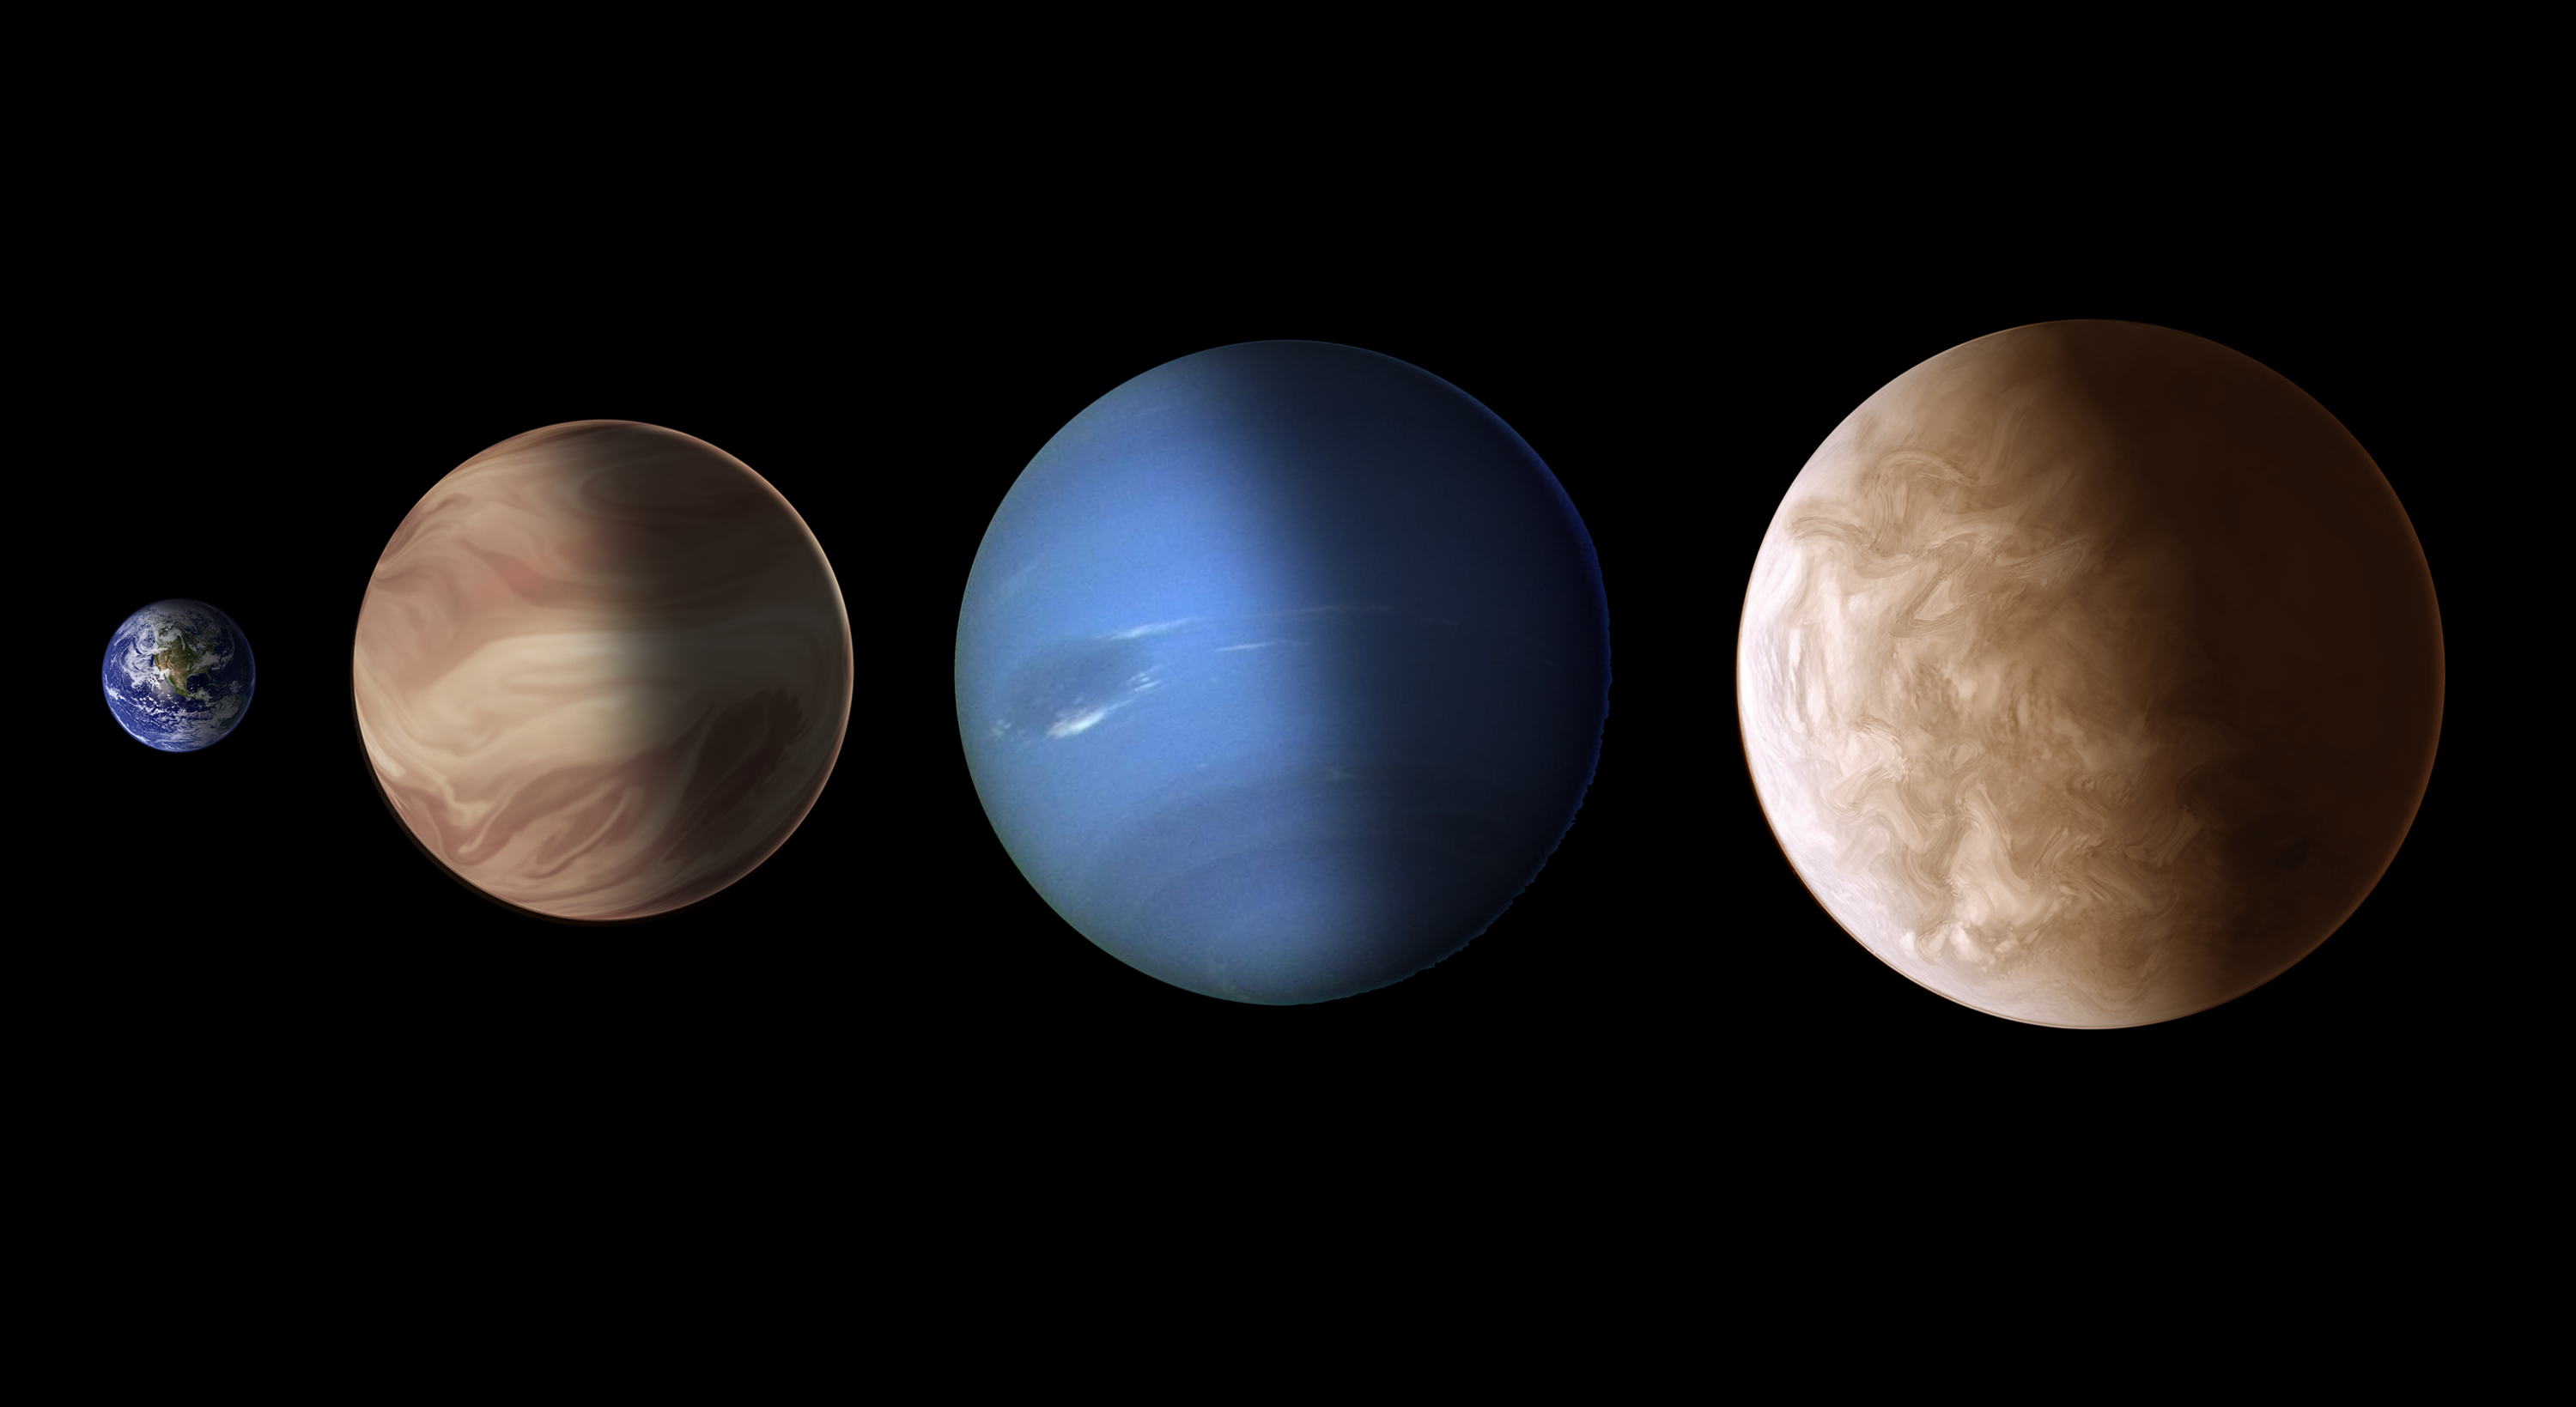

Size comparison for exoplanets GJ 436b and GJ 1214b (artist's illustration)

This illustration compares the sizes of exoplanets GJ 436b and GJ 1214b with Earth and Neptune. These so-called super-Earths have masses between those of gas giants like Neptune, and smaller, rocky planets like Earth. No such type of planet exists in our Solar System. NASA/ESA Hubble Space Telescope spectroscopic observations reveal that these worlds could very likely be smothered in clouds that cloak any information about the planets' underlying chemical compositions. This artistic rendering of the exoplanets is speculative and does not necessarily reflect what their true appearance might actually be.

Credit: NASA, ESA, and A. Feild and G. Bacon (STScI)